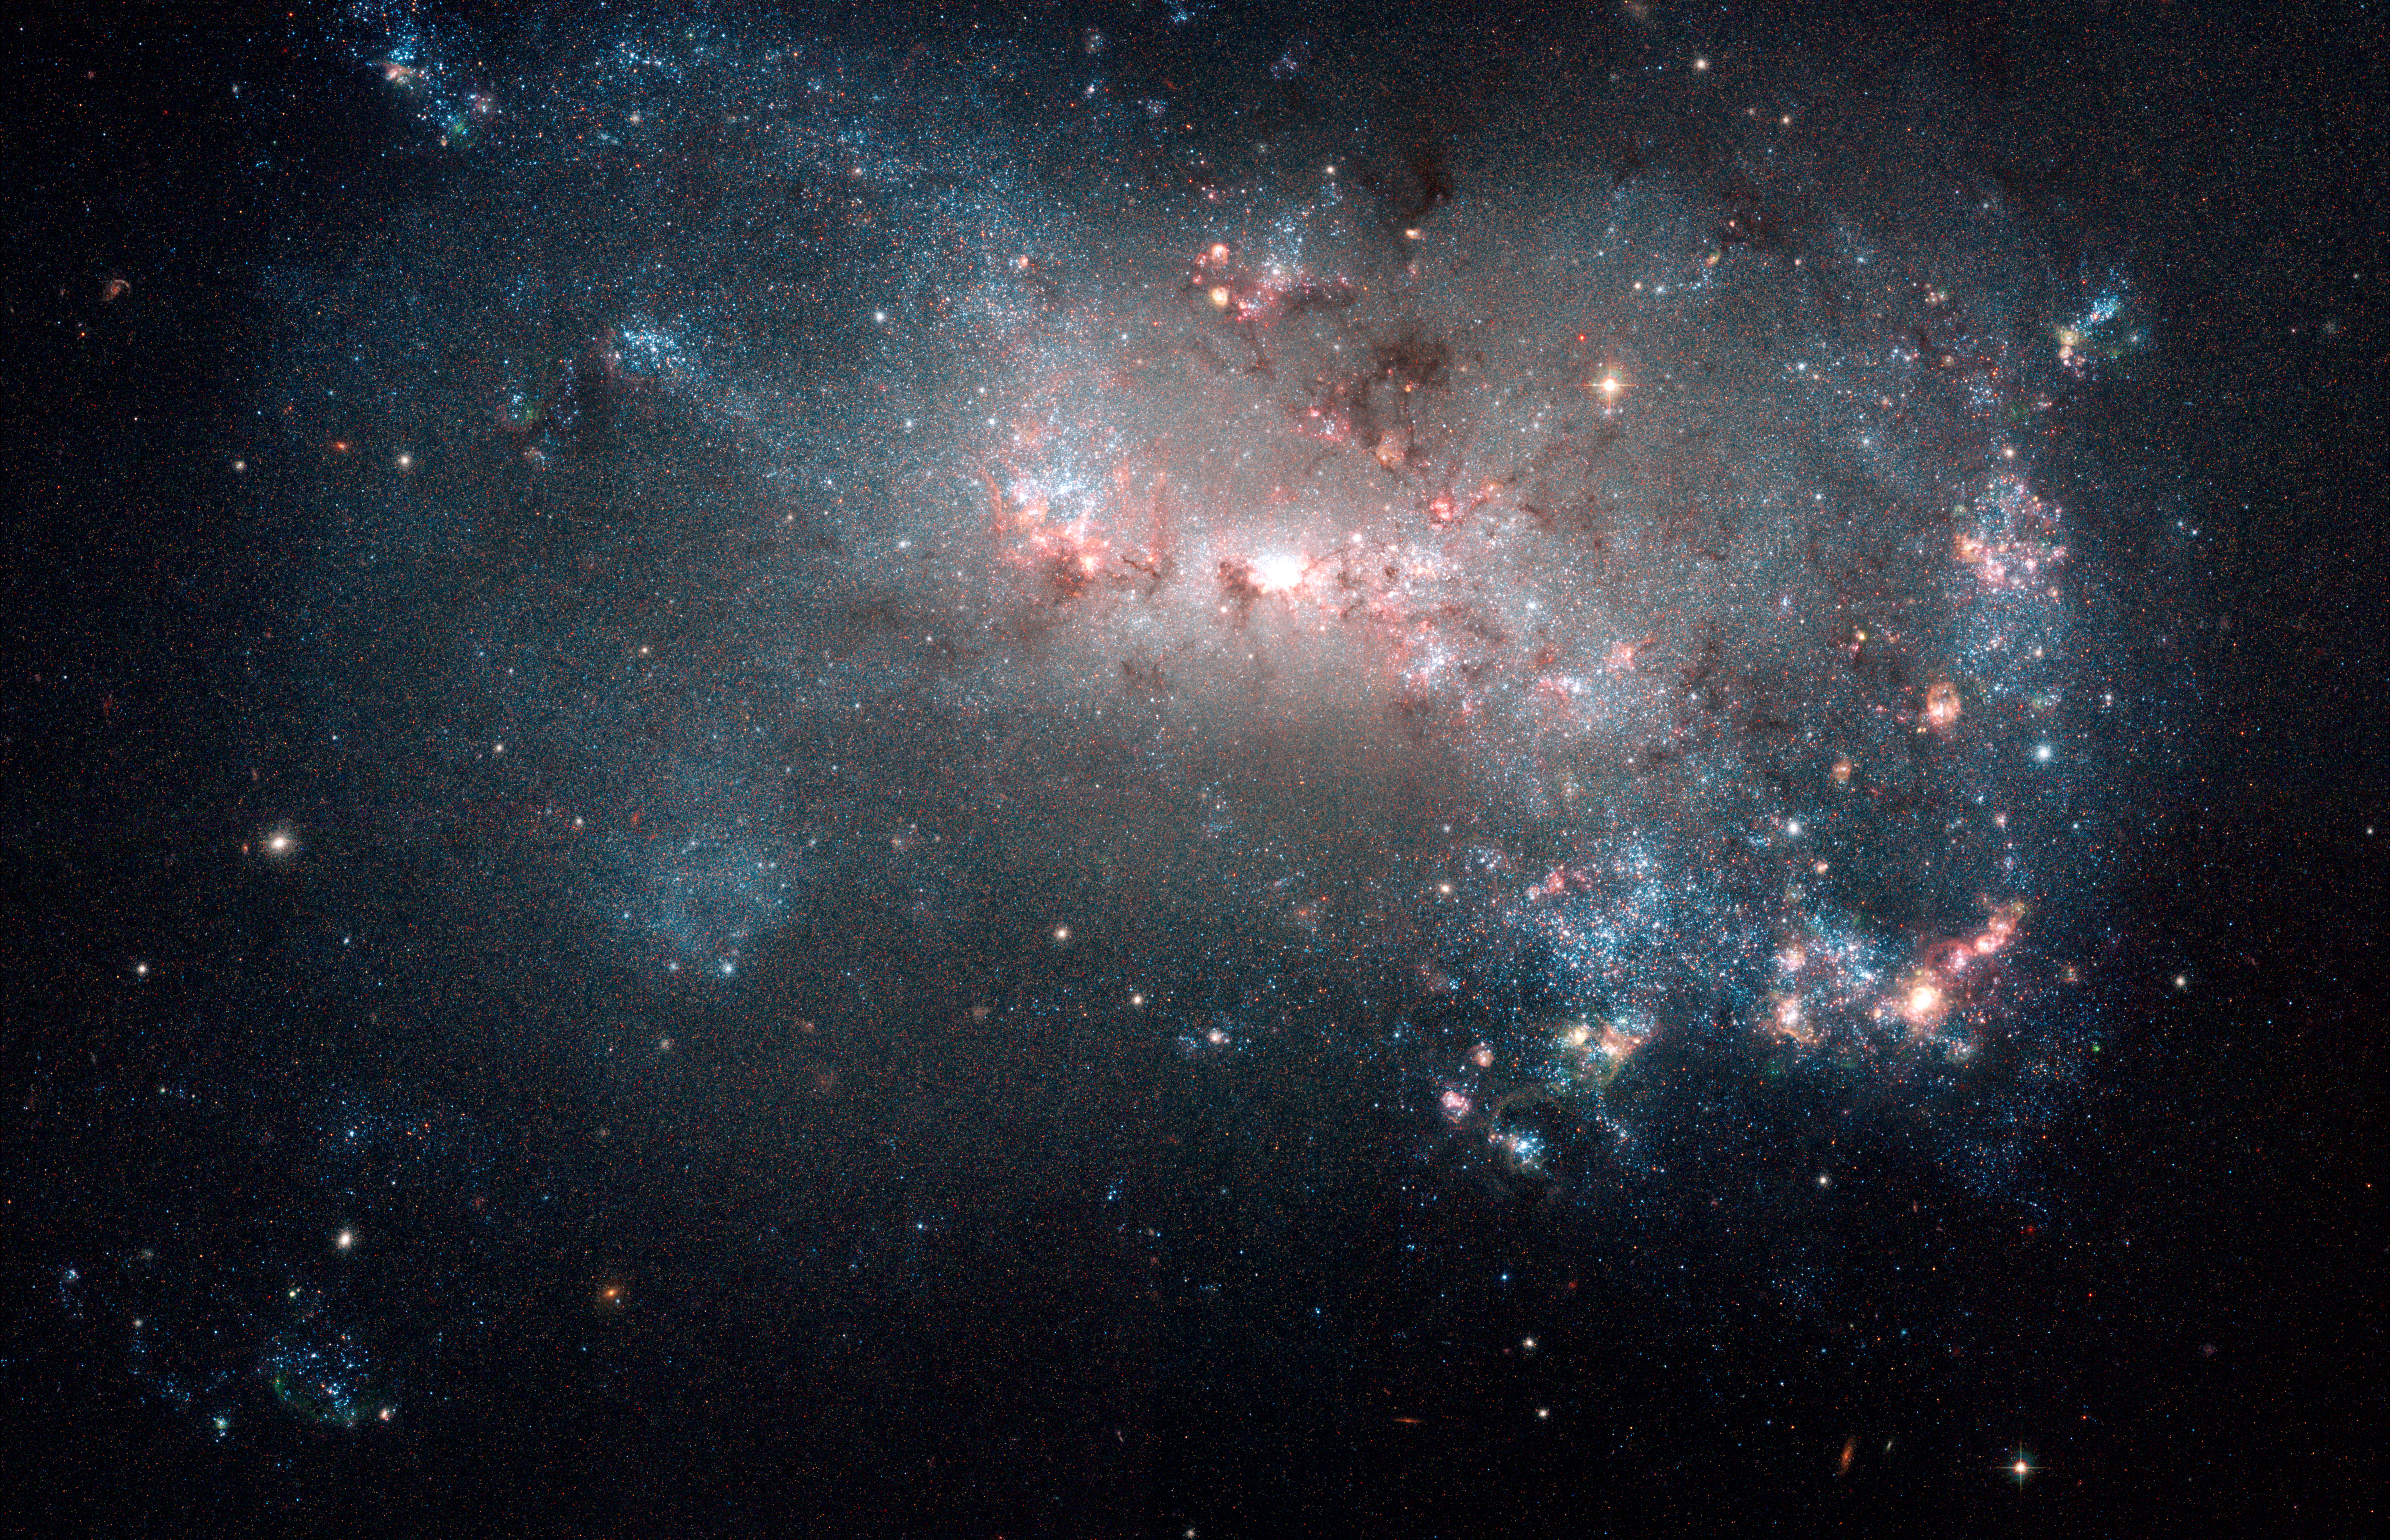

Stellar fireworks are ablaze in galaxy NGC 4449

Hundreds of thousands of vibrant blue and red stars are visible in this new image of galaxy NGC 4449 taken by the NASA/ESA Hubble Space Telescope. Hot bluish white clusters of massive stars are scattered throughout the galaxy, interspersed with numerous dustier reddish regions of current star formation. Massive dark clouds of gas and dust are silhouetted against the flaming starlight.

Credit: NASA, ESA, A. Aloisi (STScI/ESA), and The Hubble Heritage (STScI/AURA)-ESA/Hubble Collaboration